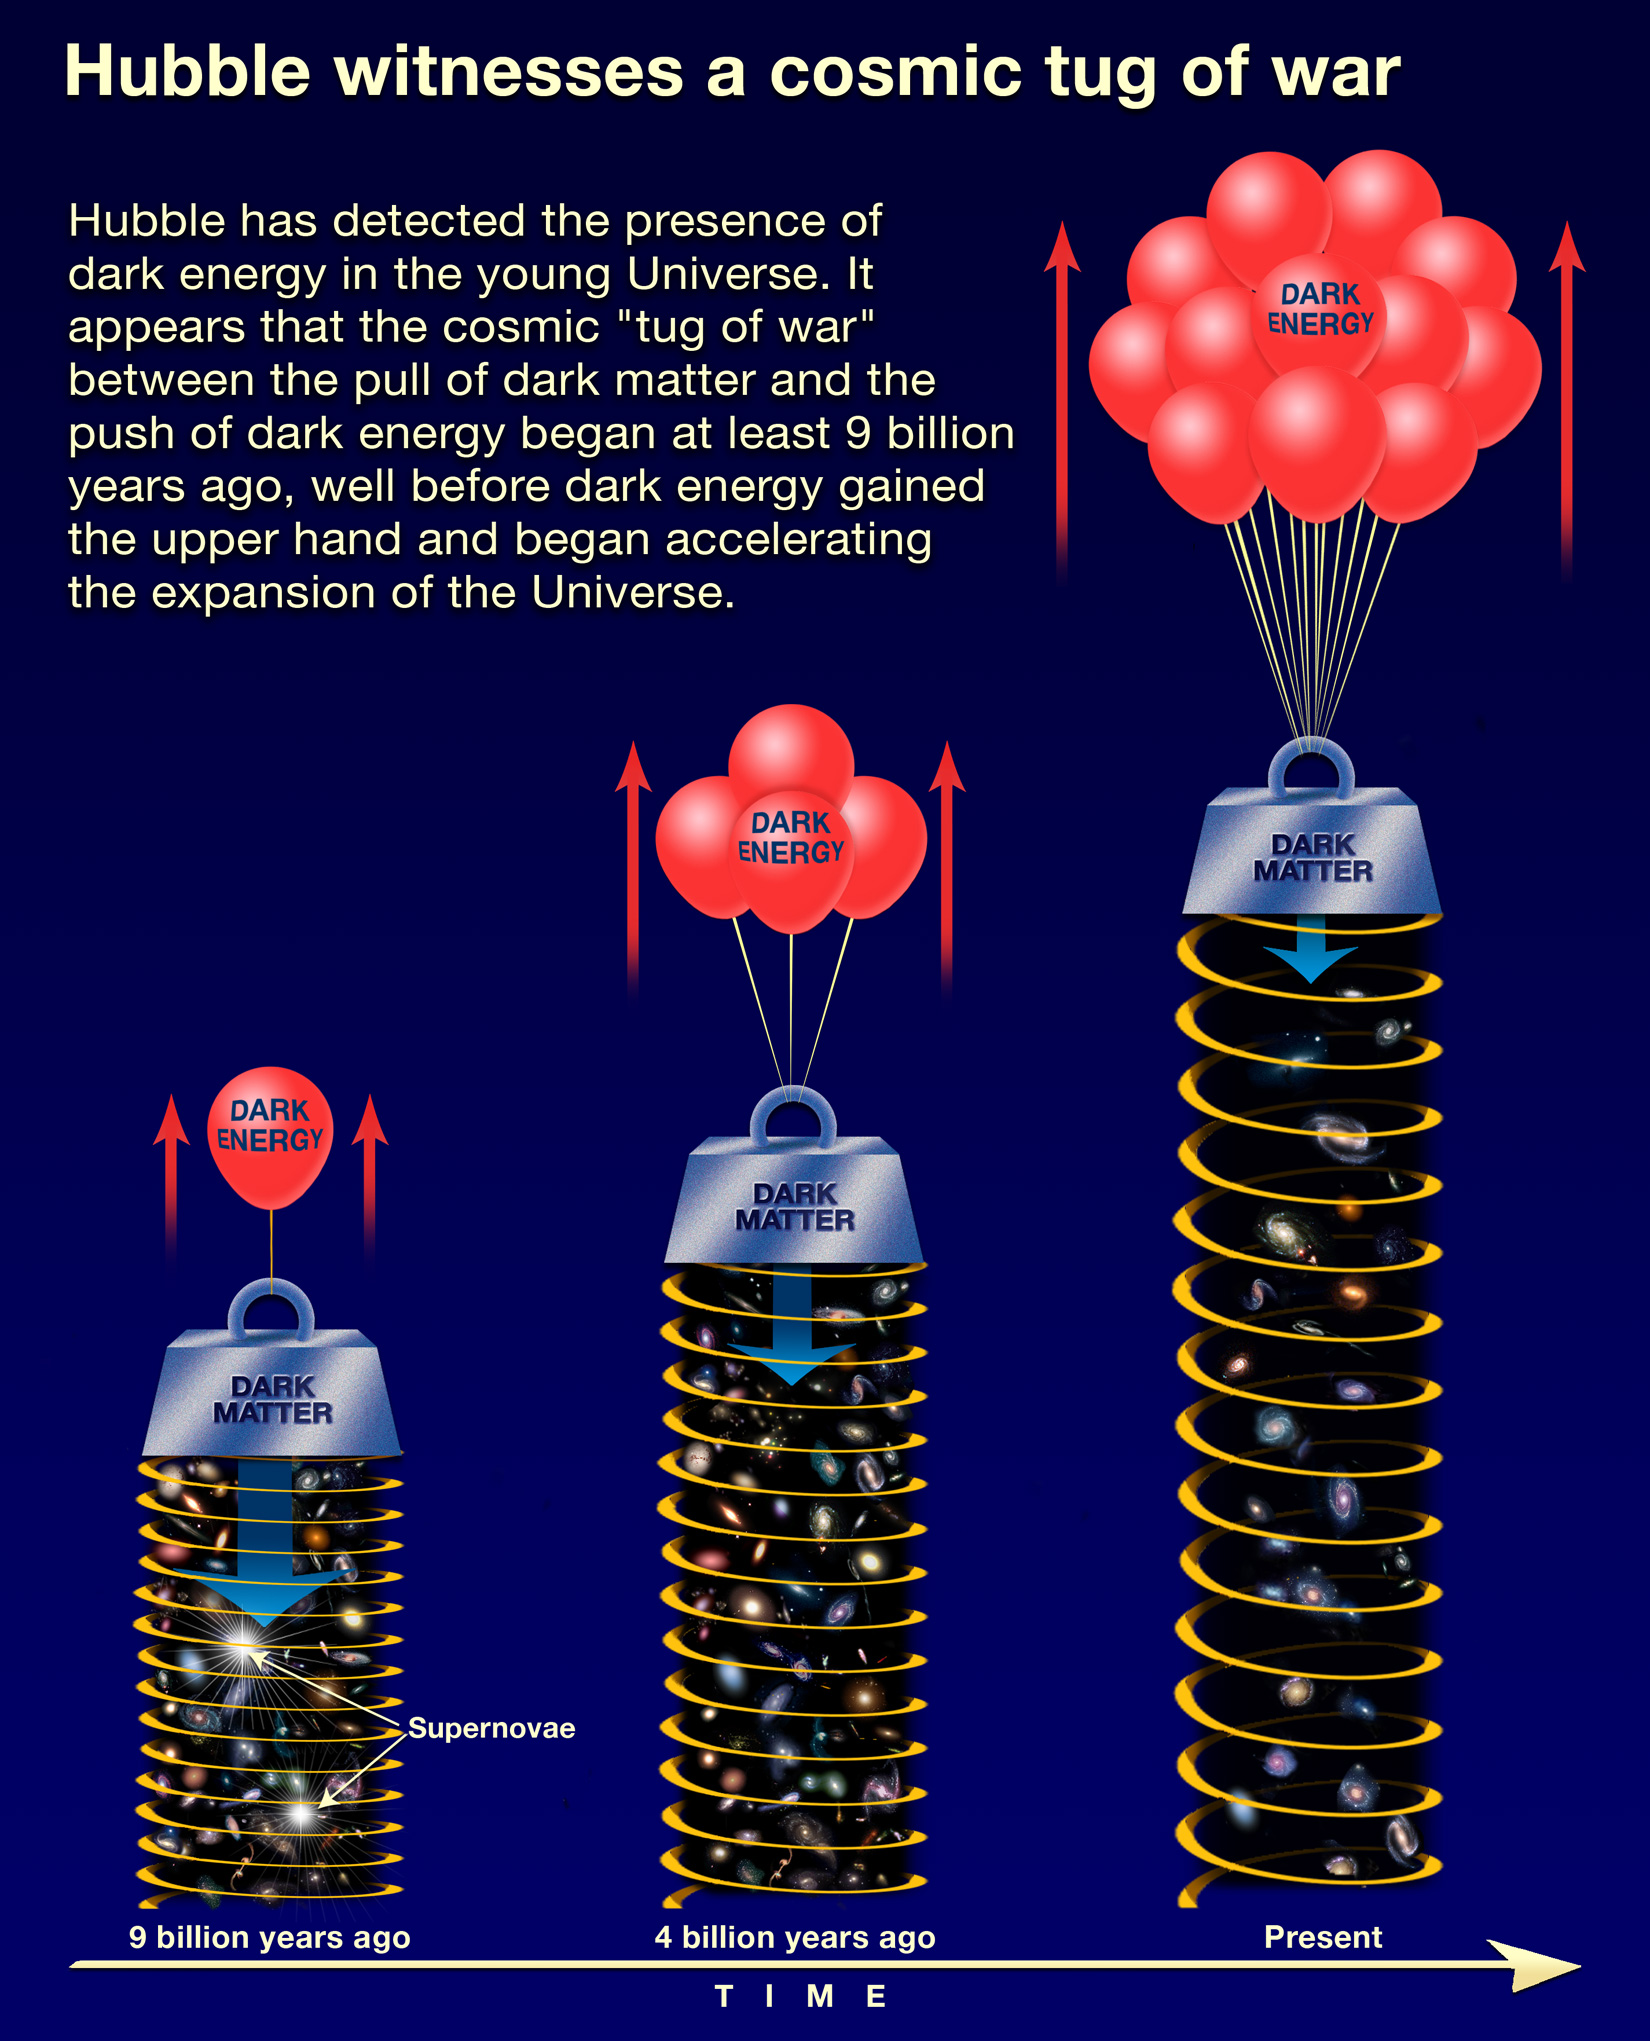

Illustration of Cosmic Forces

Scientists using NASA's Hubble Space Telescope have discovered that dark energy is not a new constituent of space, but rather has been present for most of the universe's history.

Credit: NASA, ESA, and A. Feild (STScI)